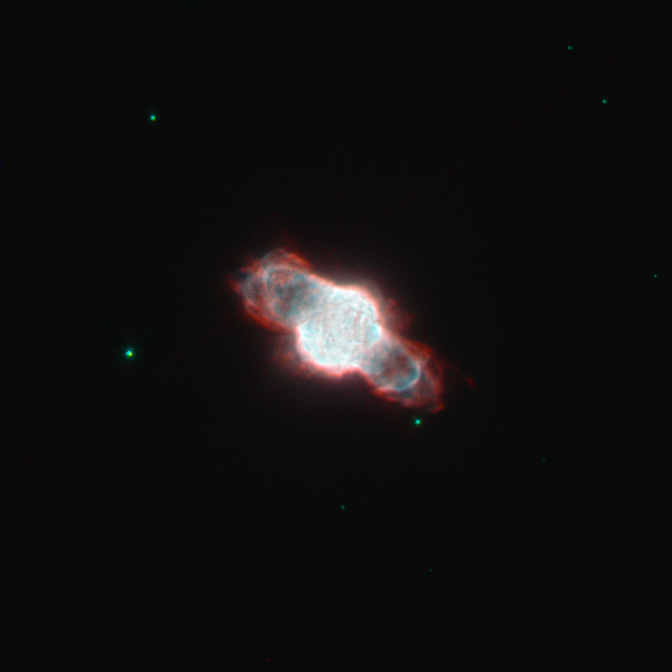

Dying star cocooned within its own gases

Astronomers have used the NASA/ESA Hubble Space Telescope to image the tiny planetary nebula NGC 6886. These celestial objects signal the final death throes of mid-sized stars (up to about eight times the mass of the Sun); when such a star exhausts its supply of hydrogen fuel, the outer layers begin to expand and cool, which creates an envelope of gas and dust that shrouds the dying star. However, the star doesn't go down without a fight, finding alternative ways to prevent it from collapsing under its own gravity and emerging as a white dwarf. In the process, the star's surface temperature increases and it is eventually hot enough to emit strong ultraviolet radiation and make the cocoon of gas glow as a stunning planetary nebula.

Stellar death isn't quick and painless: the planetary nebula stage typically lasts several tens of thousands of years. By studying the elements that are present in the nebula today, astronomers can determine the original chemical make-up of the star. Studies suggest that the star belonging to NGC 6886 may have originally been similar to the Sun, containing similar quantities of carbon, nitrogen and neon, although heavier elements, such as sulphur, were less plentiful.

Keen amateur astronomers with mid-level telescopes will find it a rewarding challenge to track down NGC 6886 in the small constellation of Sagitta. It is tiny, but not particularly faint: high magnification, a good chart, a dark site and averted vision are needed to spot this elusive celestial jewel.

This picture was created by combining images taken using the Wide Field Planetary Camera 2 on Hubble. Filters that let through emission from ionised nitrogen gas (F658N, coloured red), ionised oxygen (F502N, coloured blue) and a broadband yellow filter (F555W, coloured green, and also contributing to the blue) were used. The exposure times were 700 s, 600 s and 320 s respectively. The field of view is merely 30 arcseconds across.

Credit: ESA/Hubble & NASA